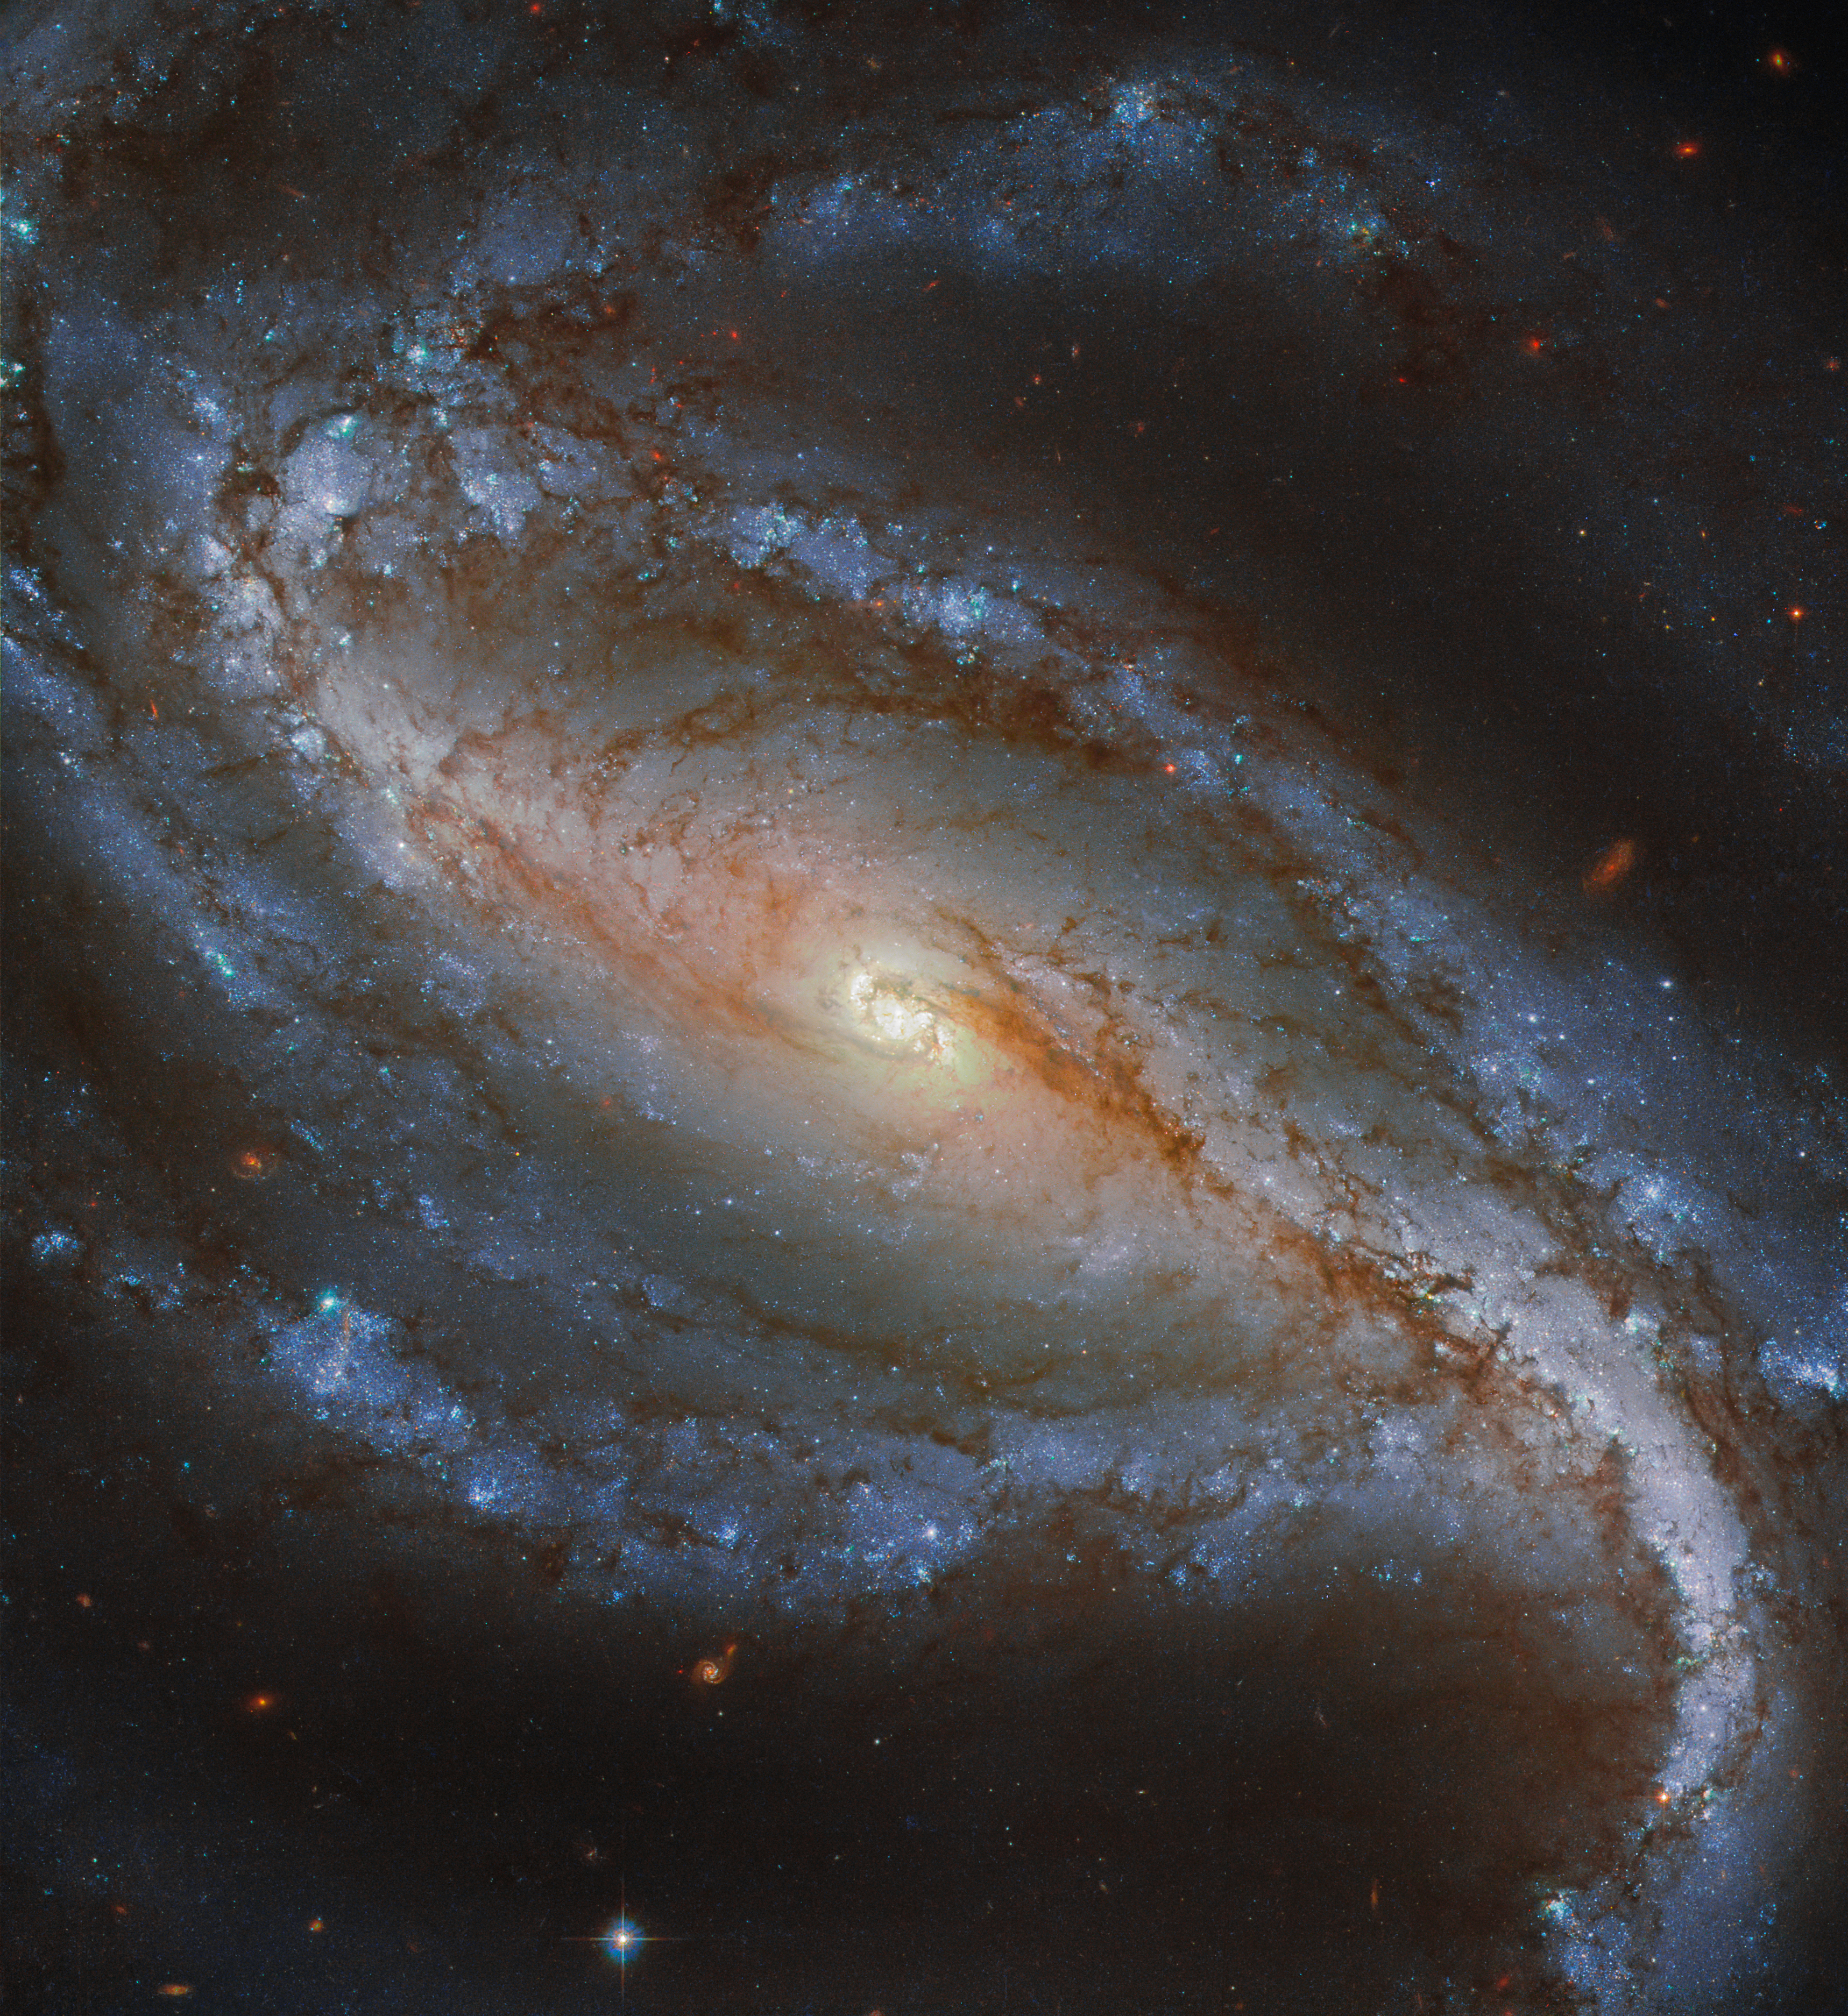

Sculpted in Sculptor

First discovered in 1798 by German-English astronomer William Hershel, NGC 613 is a galaxy which lies in the southern constellation of Sculptor 67 million light-years away.

Featured here in a new image from the NASA/ESA Hubble Space Telescope, NGC 613 is a lovely example of a barred spiral galaxy. It is easily distinguishable as such because of its well defined central bar and long arms, which spiral loosely around its nucleus. As revealed by surveys, about two thirds of spiral galaxies, including our own Milky Way galaxy, contain a bar.

Recent studies have shown that bars are more common in galaxies now than they were in the past, which gives us important clues about galaxy formation and evolution.

Credit: ESA/Hubble & NASA, G. Folatelli